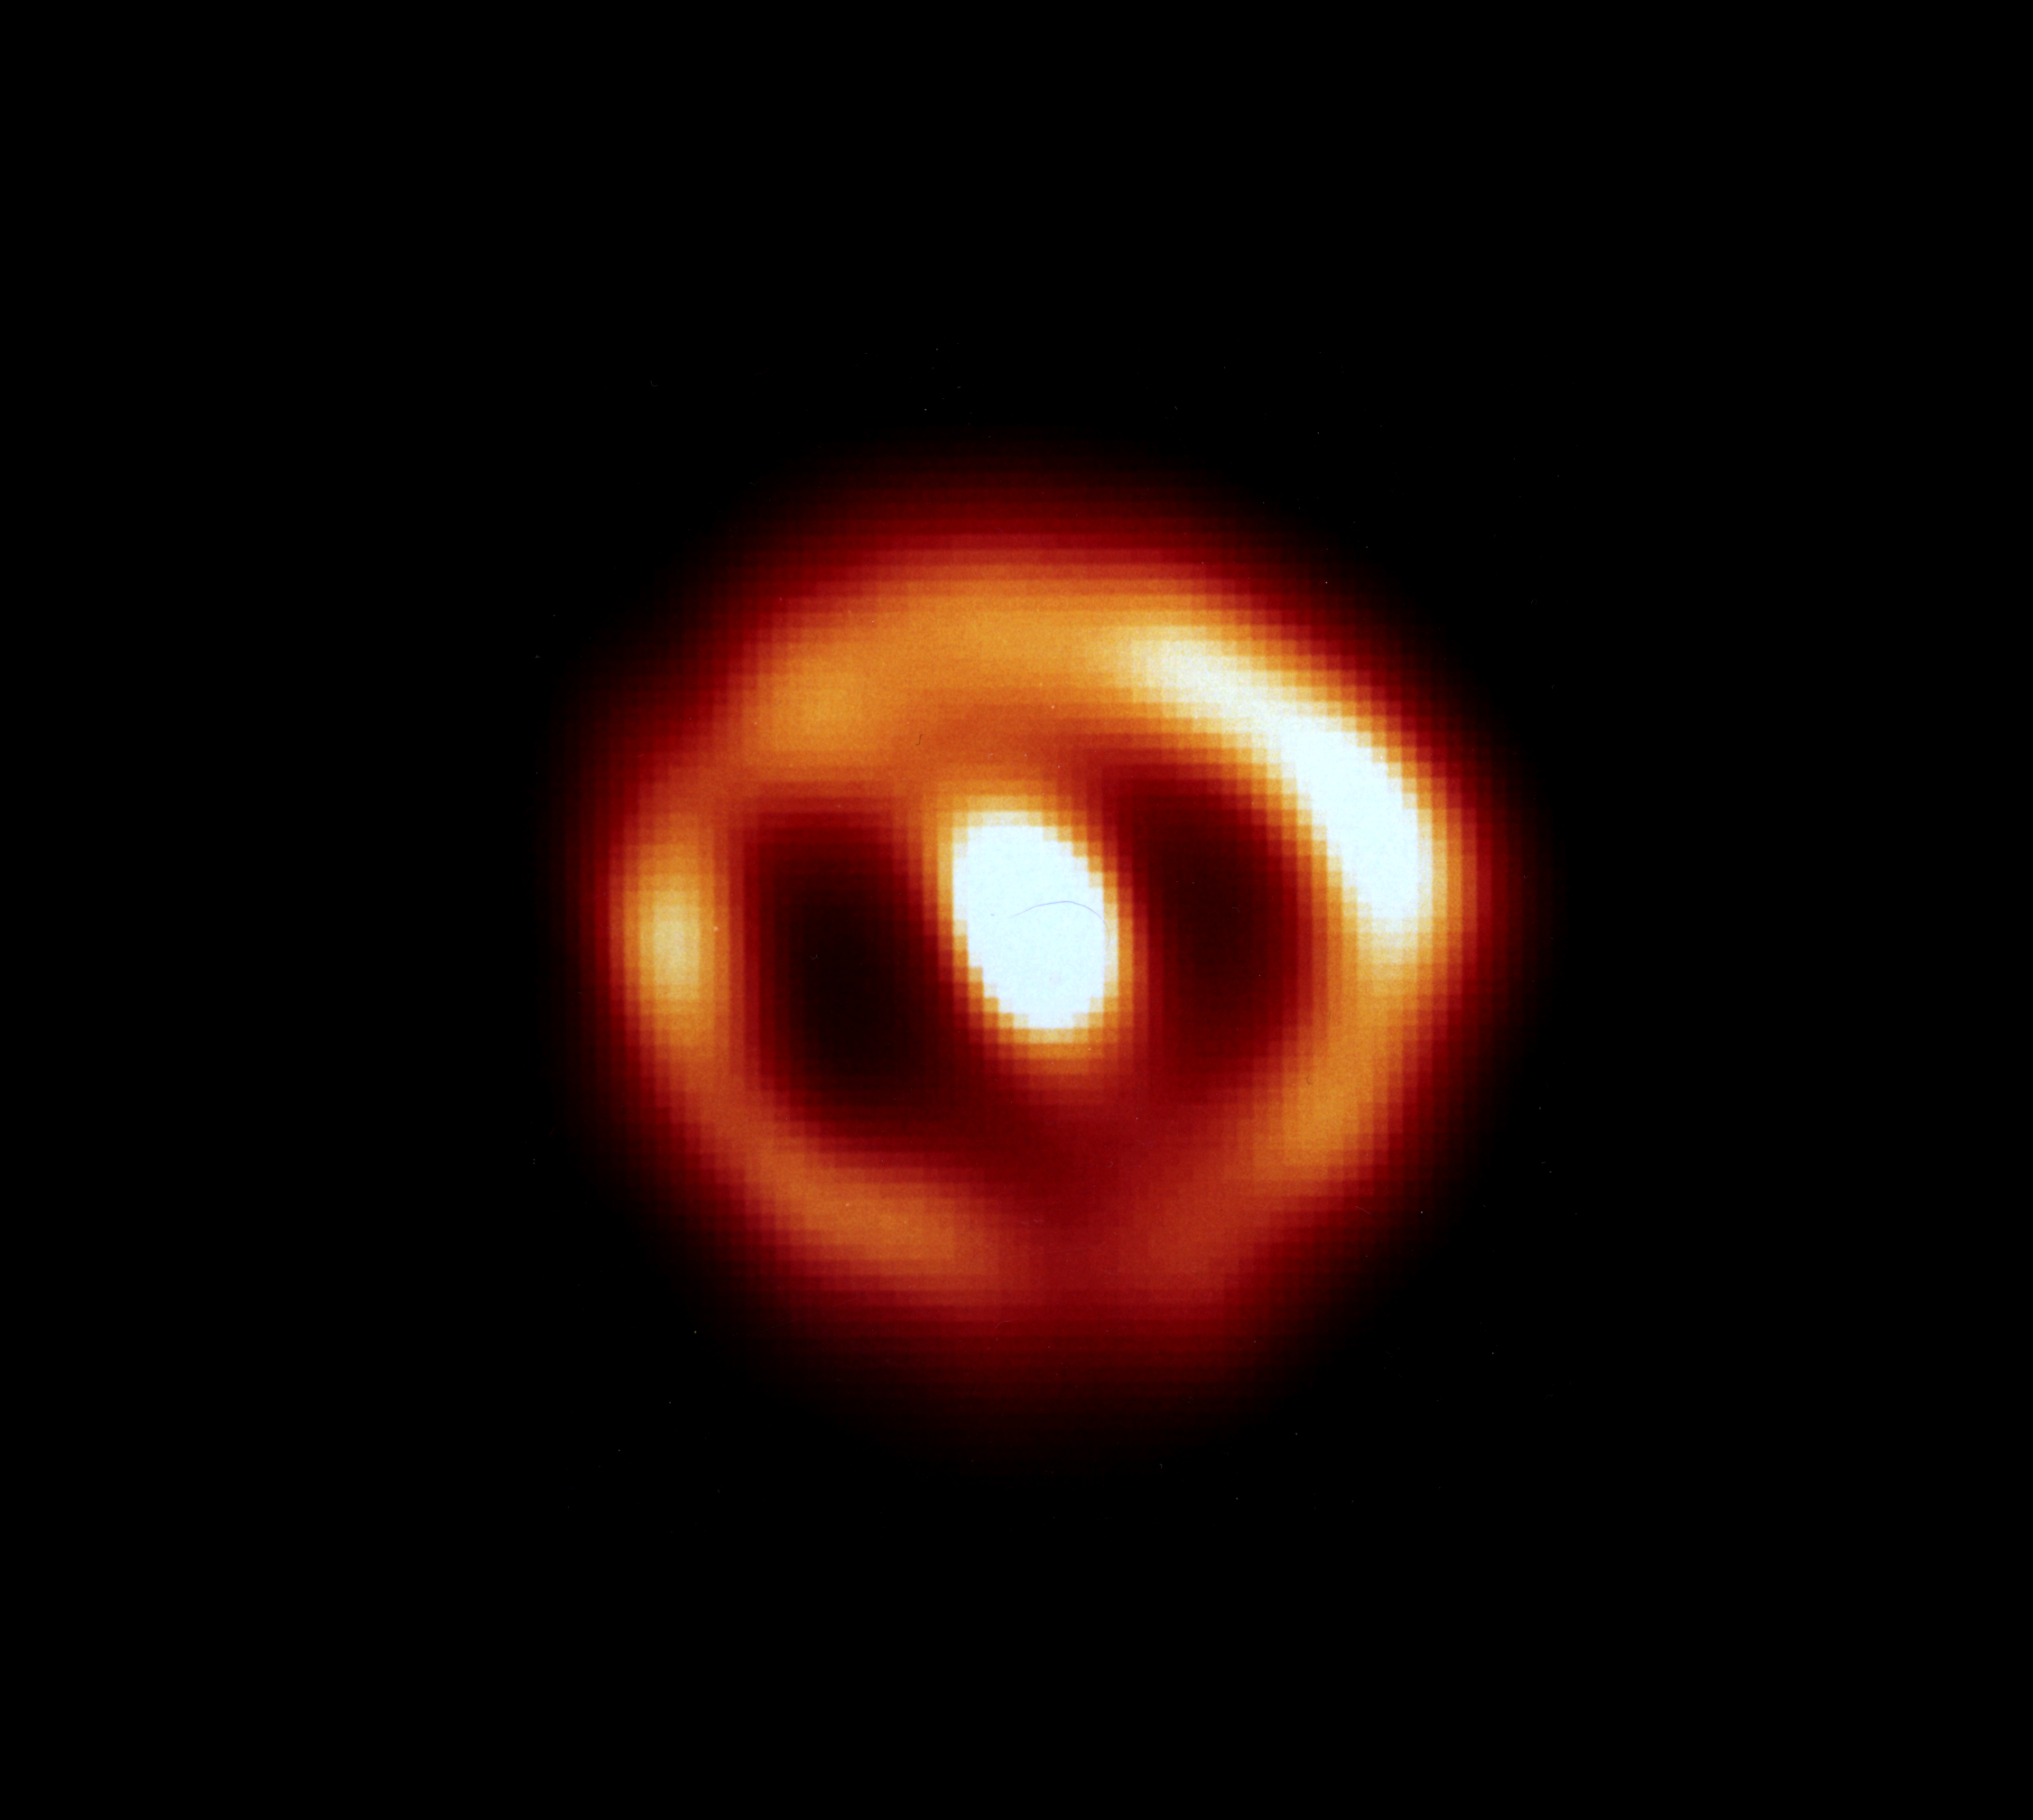

Hubble sees gas shell around Nova Cygni 1992

A NASA/ESA Hubble Space Telescope (HS1) image of a tepidly ballooning bubble of gas blasted off a star. The shell surrounds Nova Cygni 1992 which erupted on February 19, 1992. The shell is so young it still contains a record of the initial conditions of the explosion.

The HST image was taken in ultraviolet light with the European Space Agency's Faint Object Camera (FOC) on May 31, 1993, 467 days after the explosion. The FOC reveals a remarkably circular yet slightly lumpy ring-like structure. The ring is the edge of the bubble's shell of hot gas. The shell is only 37 billion miles (about 60 billion kilometres) across, or 400 times the diameter of the solar system. A beam of light could cross the shell in less than 2-1/2 days.

Credit: Francesco Parasce, ESA/STScI and NASA